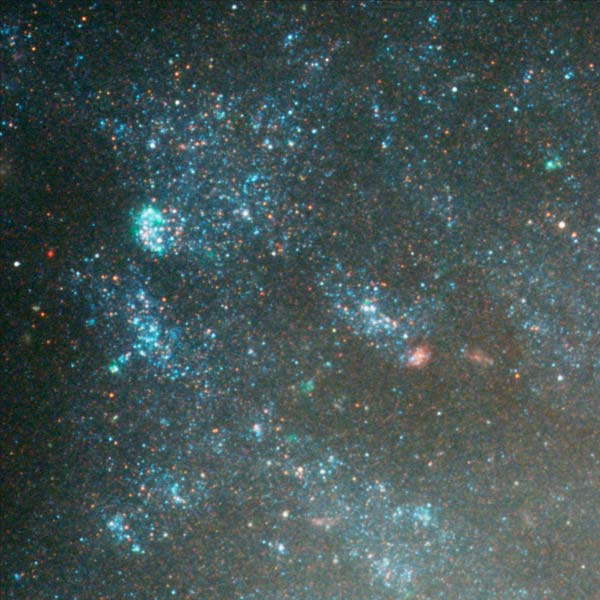

Details from ACS Image of NGC 3370: Edge of Galaxy (Region 1)

A region on the edge of the galaxy shows bright blue clusters of young, massive stars as well as distant, red background galaxies shining through.

Credit: NASA/ESA, The Hubble Heritage Team and A. Riess (STScI)